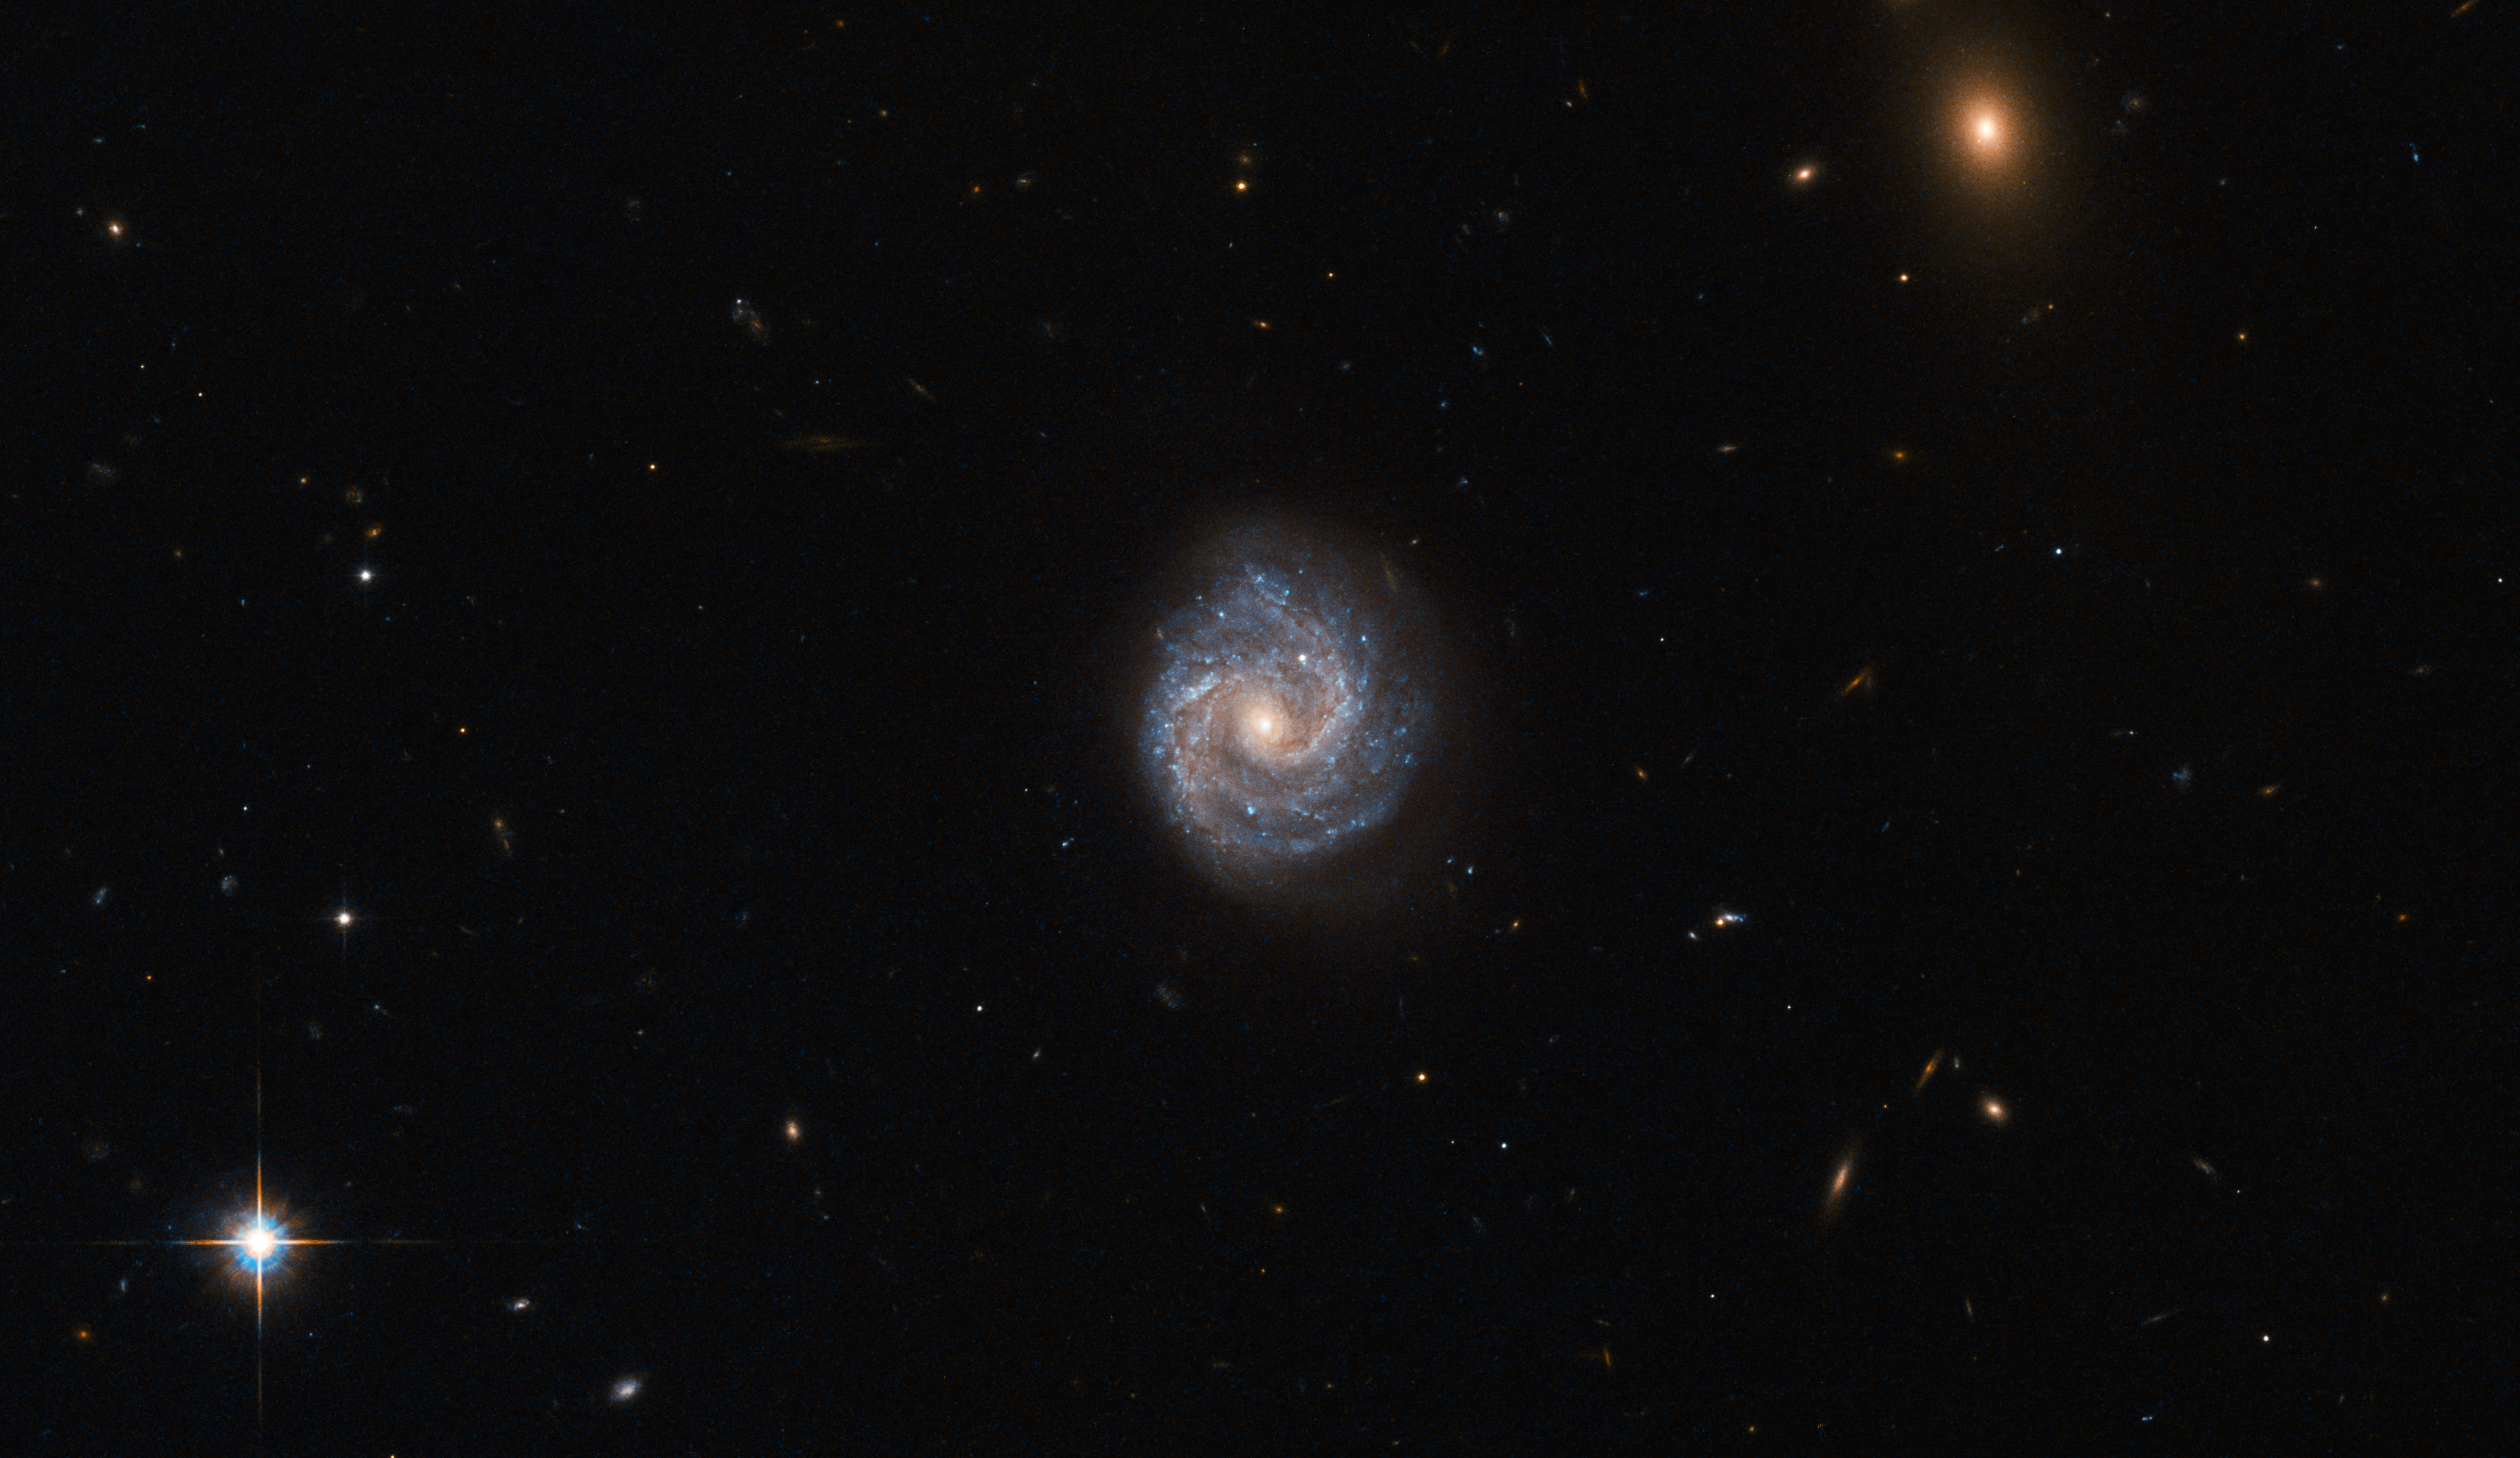

What’s in a name?

Not all galaxies have the luxury of possessing a simple moniker or quirky nickname. The subject of this NASA/ESA Hubble Space Telescope image was one of the unlucky ones, and goes by the rather unpoetic name of 2XMM J143450.5+033843.

Such a name may seem like a random jumble of numbers and letters, but like all galactic epithets it has a distinct meaning. This galaxy, for example, was detected and observed as part of the second X-ray sky survey performed by ESA’s XMM-Newton Observatory. Its celestial coordinates form the rest of the bulky name, following the “J”: a right ascension value of 14h 34m 50.5s (this can be likened to terrestrial longitude), and a declination of +03d 38m 43s (this can be likened to terrestrial latitude). The other fuzzy object in the frame was named in the same way — it is a bright galaxy named 2XMM J143448.3+033749.

2XMM J143450.5+033843 lies nearly 400 million light-years away from Earth. It is a Seyfert galaxy that is dominated by something known as an Active Galactic Nucleus — its core is thought to contain a supermassive black hole that is emitting huge amounts of radiation, pouring energetic X-rays out into the Universe.

Credit: ESA/Hubble & NASA